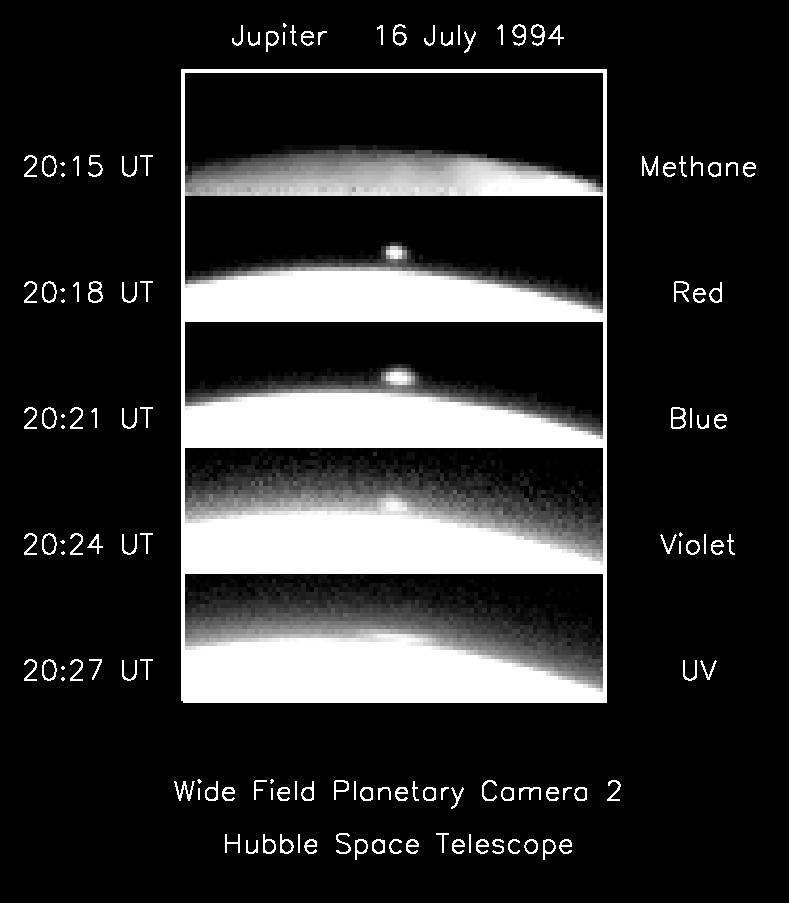

Hubble sees comet fireball on limb of Jupiter

Sequence of images showing evidence for a plume near the terminator of Jupiter at the time of the A impact. A bright feature appears 1000-1500 km above the limb of Jupiter at 20:18:17 in the 953 nm filter. (An image at 20:15:17 did not show a detached feature). A possible interpretation is that the feature is visible by reflected sunlight, and the apparent detachment is due to the shadow of Jupiter on the plume. During the temporal sequence from top to bottom, spreading of the feature is clearly resolved. The feature is visible at wavelengths ranging from the ultraviolet through the near infrared.

Credit: HST Jupiter Imaging Science Team